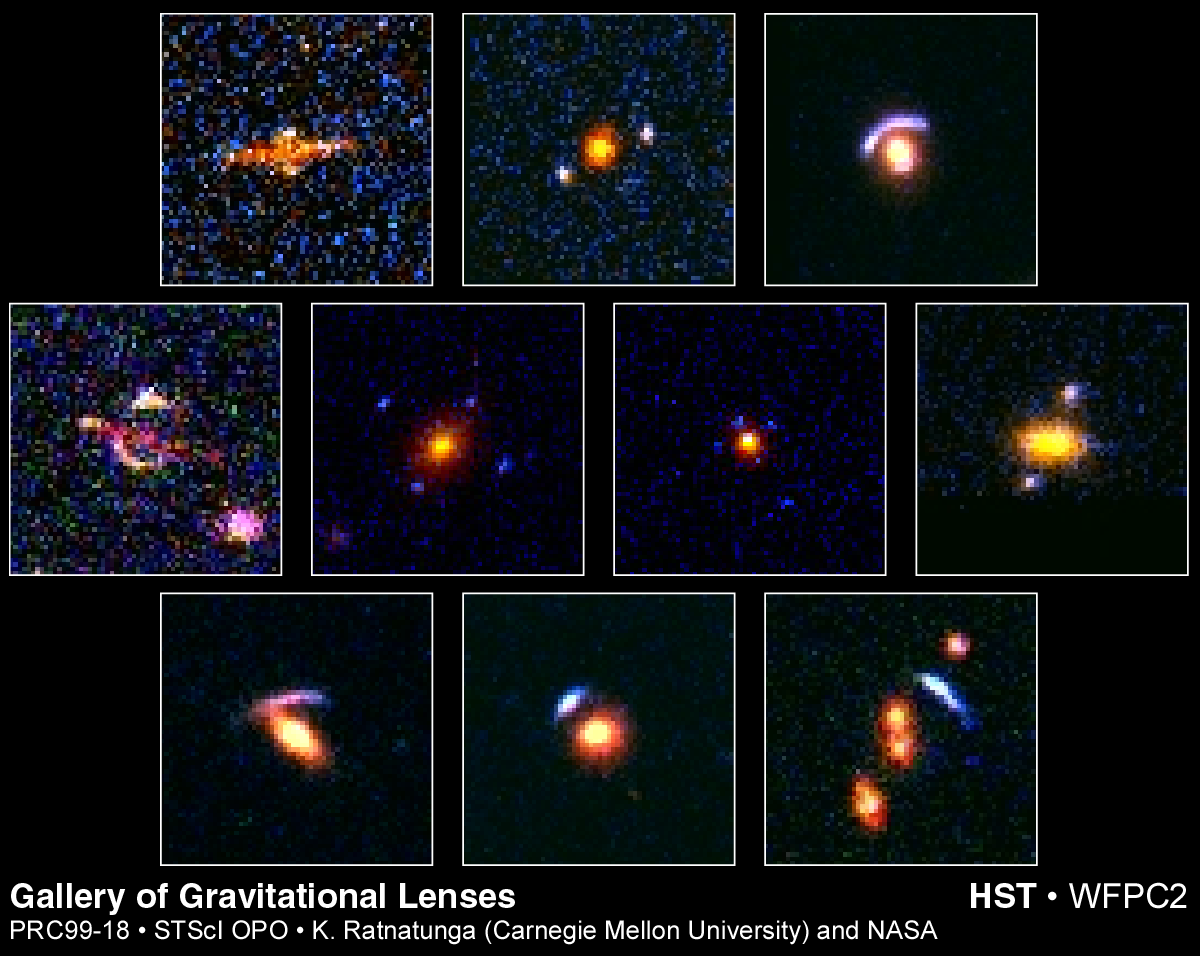

Hubble's top ten gravitational lenses

The NASA/ESA Hubble Space Telescope serendipitous survey of the sky has uncovered exotic patterns, rings, arcs and crosses that are all optical mirages produced by a gravitational lens, nature's equivalent of having giant magnifying glass in space.

Shown are the top 10 lens candidates uncovered in the deepest 100 Hubble fields. Hubble's sensitivity and high resolution allow it to see faint and distant lenses that cannot be detected with ground-based telescopes whose images are blurred by Earth's atmosphere.

Credit: Kavan Ratnatunga (Carnegie Mellon Univ.) and NASA/ESA